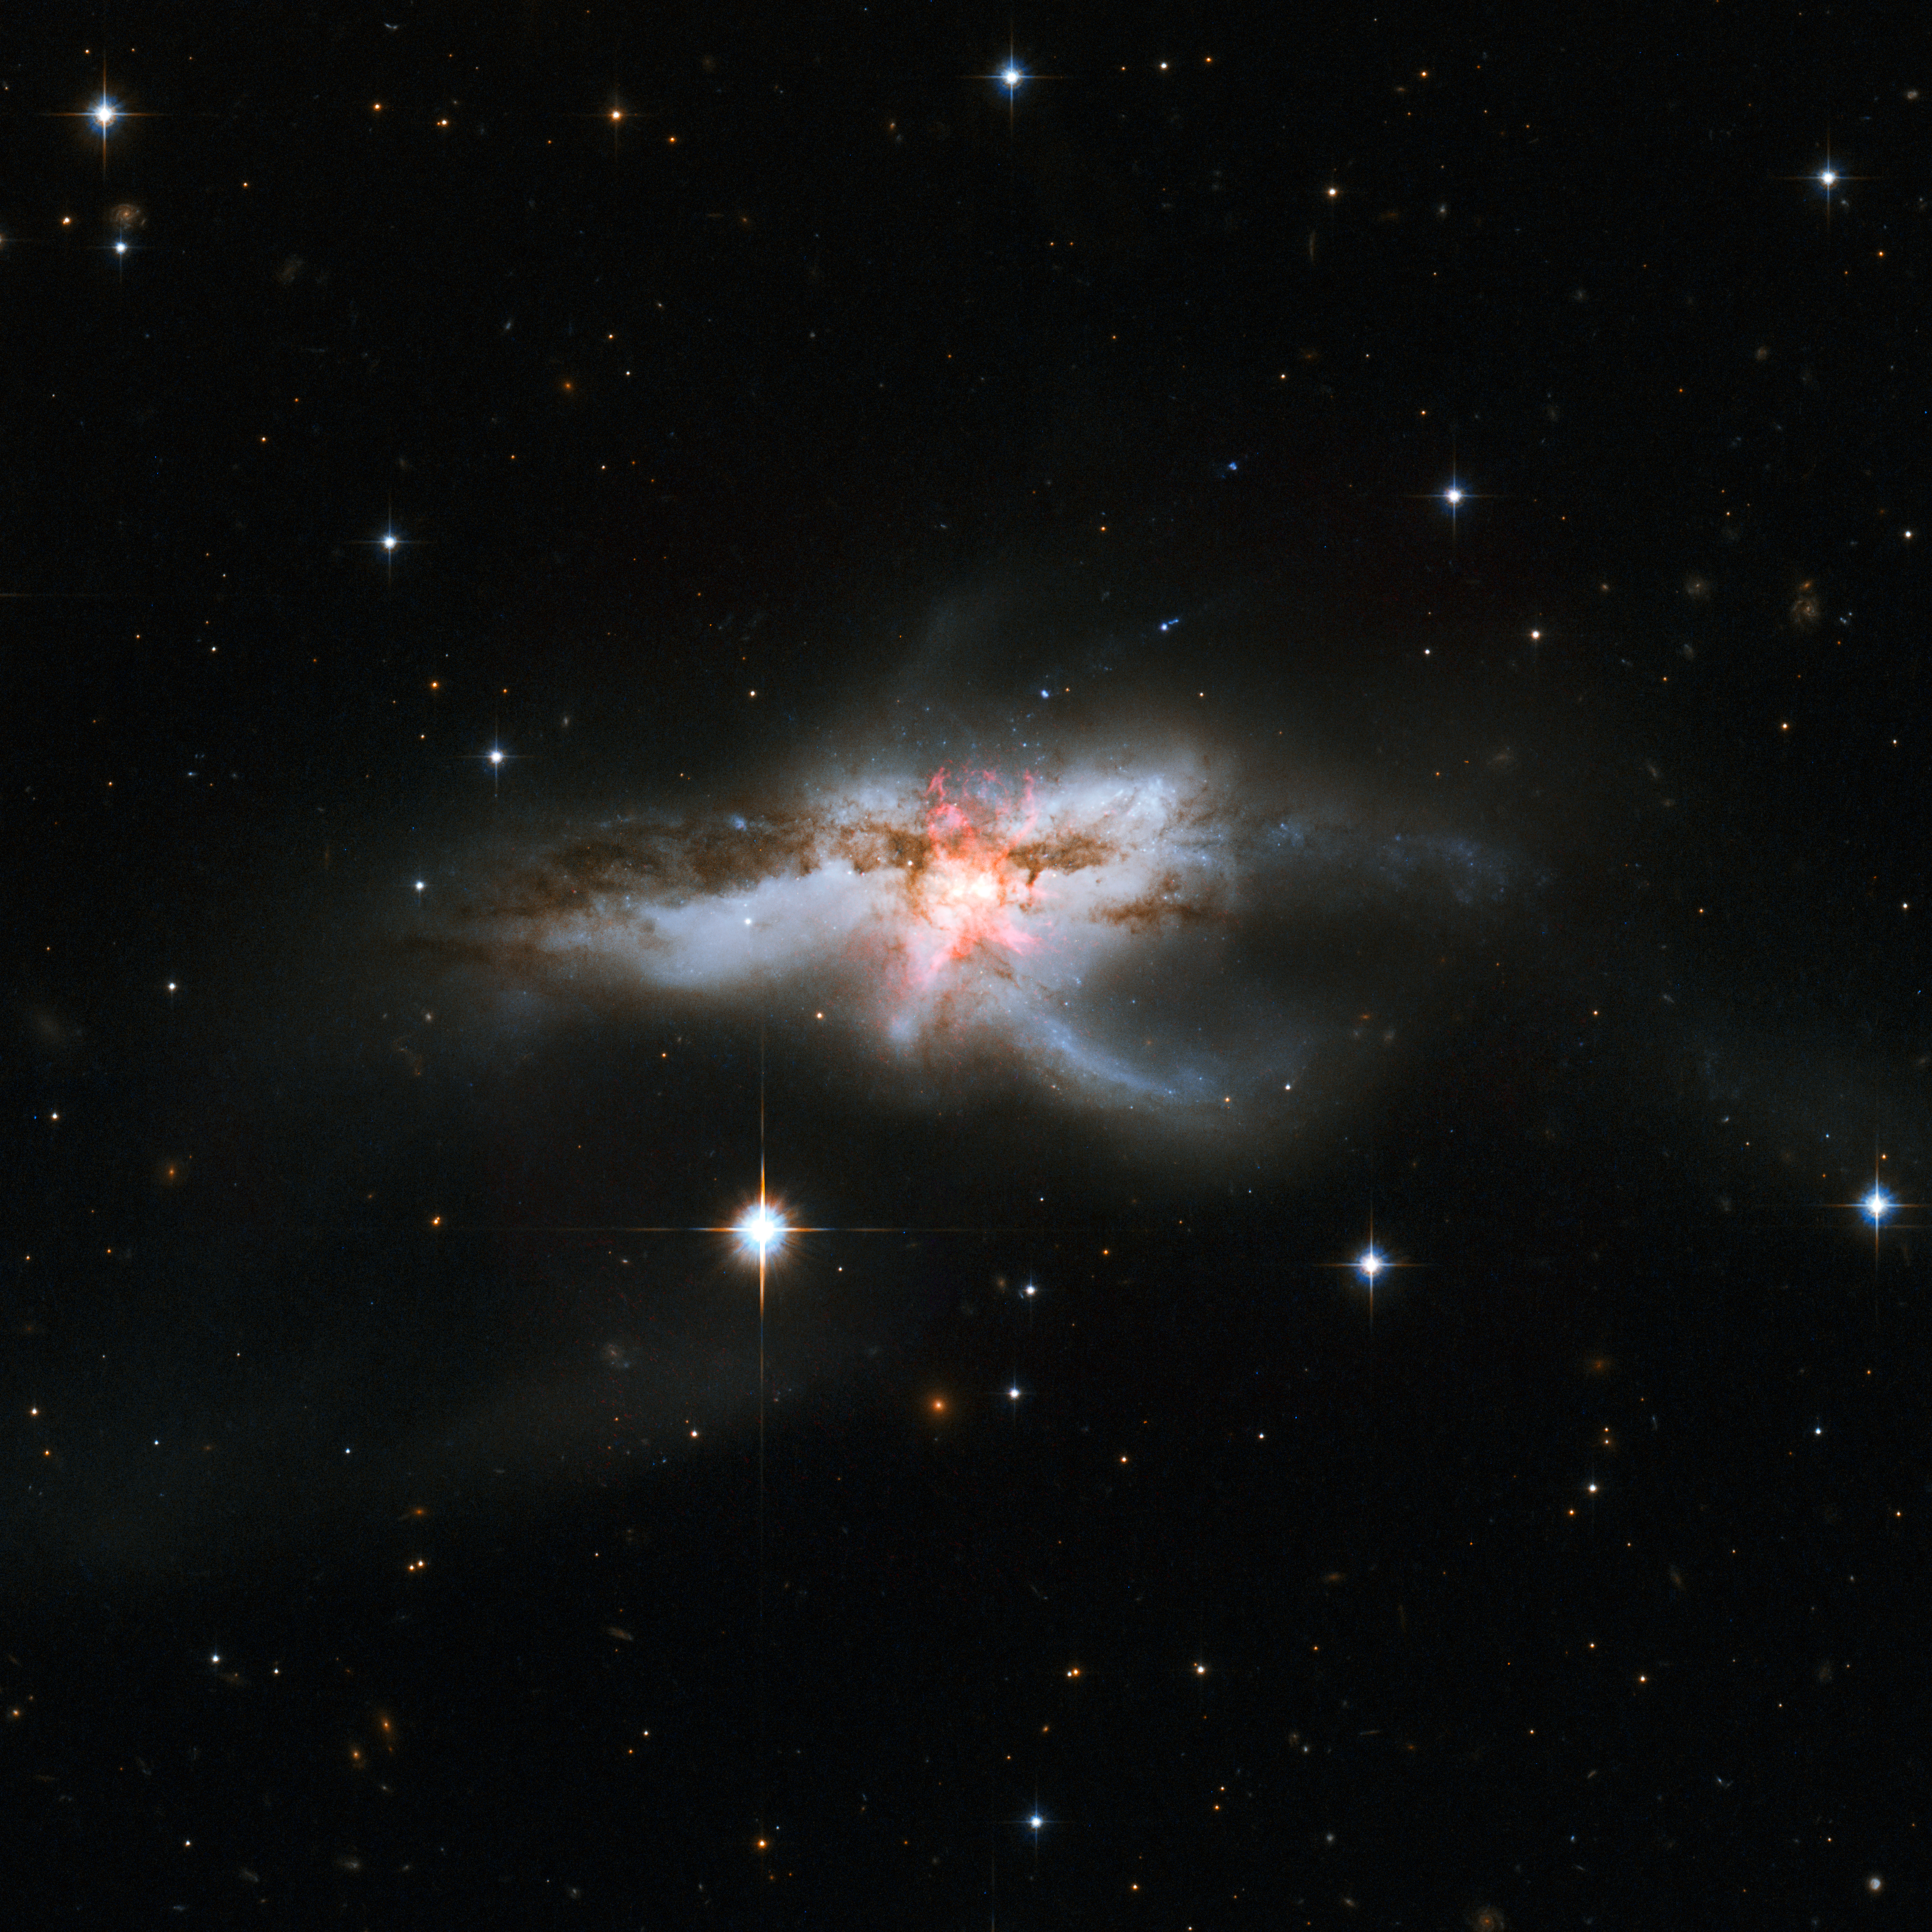

Hubble revisits tangled NGC 6240

Not all galaxies are neatly shaped, as this new NASA/ESA Hubble Space Telescope image of NGC 6240 clearly demonstrates. Hubble previously released an image of this galaxy back in 2008, but the knotted region, shown here in a pinky-red hue at the centre of the galaxies, was only revealed in these observations from Hubble’s Wide Field Camera 3 and Advanced Camera for Surveys.

NGC 6240 lies 400 million light-years away in the constellation of Ophiuchus (The Serpent Holder). This galaxy has an elongated shape with branching wisps, loops and tails. This mess of gas, dust and stars bears more than a passing resemblance to a butterfly and, though perhaps less conventionally beautiful, a lobster.

This bizarrely-shaped galaxy did not begin its life looking like this; its distorted appearance is a result of a galactic merger that occurred when two galaxies drifted too close to one another. This merger sparked bursts of new star formation and triggered many hot young stars to explode as supernovae. A new supernova was discovered in this galaxy in 2013, named SN 2013dc. It is not visible in this image, but its location is indicated here.

At the centre of NGC 6240 an even more interesting phenomenon is taking place. When the two galaxies came together, their central black holes did so too. There are two supermassive black holes within this jumble, spiralling closer and closer to one another. They are currently only some 3000 light-years apart, incredibly close given that the galaxy itself spans 300 000 light-years. This proximity secures their fate as they are now too close to escape each other and will soon form a single immense black hole.

Credit: NASA, ESA, the Hubble Heritage (STScI/AURA)-ESA/Hubble Collaboration, and A. Evans (University of Virginia, Charlottesville/NRAO/Stony Brook University)